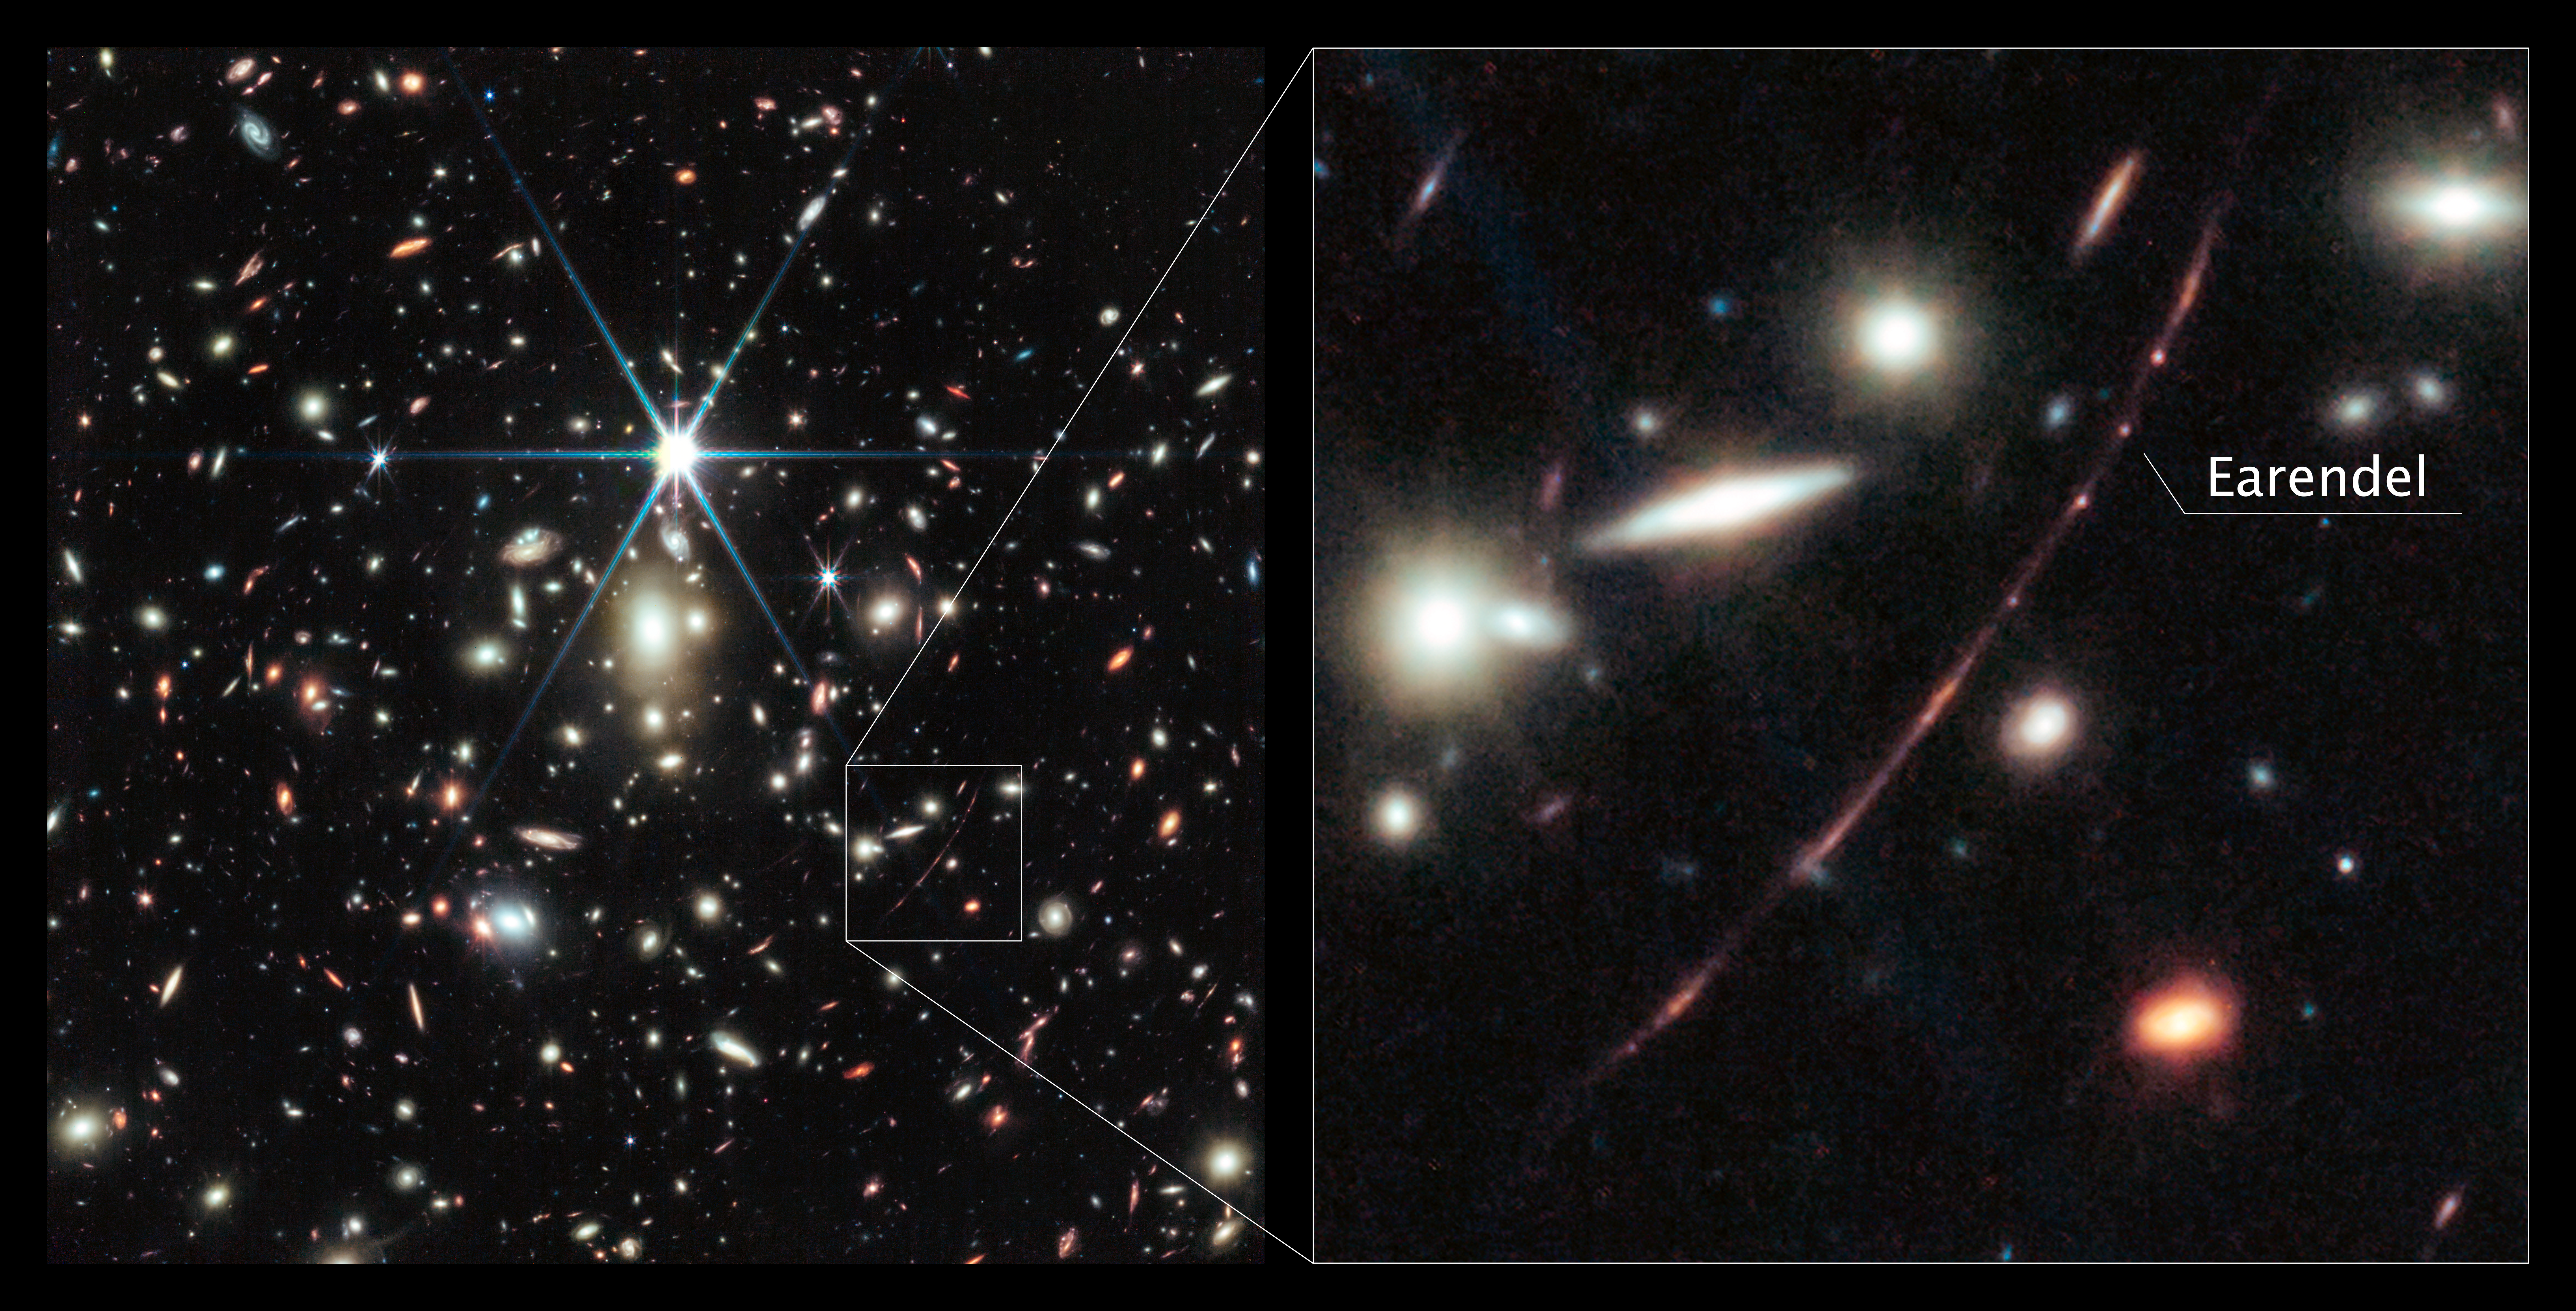

Earendel and the Sunrise Arc in the galaxy cluster WHL0137-08

This image from the NASA/ESA/CSA James Webb Space Telescope shows a massive galaxy cluster called WHL0137-08, and at the right, an inset of the most strongly magnified galaxy known in the Universe’s first billion years: the Sunrise Arc. Within that galaxy is the most distant star ever detected, first discovered by the NASA/ESA Hubble Space Telescope.

Webb’s NIRCam (Near-Infrared Camera) instrument reveals the star, nicknamed Earendel, to be a massive B-type star more than twice as hot as our Sun, and about a million times more luminous. Stars of this mass often have companions. Astronomers did not expect Webb to reveal any companions of Earendel since they would be so close together and indistinguishable on the sky. However, based solely on the colours of Earendel detected by Webb, astronomers think they see hints of a cooler companion star.

Webb’s NIRCam also shows other remarkable details in the Sunrise Arc. Features include both young star-forming regions and older established star clusters. On either side of the wrinkle of maximum magnification, which runs right through Earendel, these features are mirrored by the distortion of the gravitational lens. The region forming stars appears elongated, and is estimated to be less than 5 million years old. Smaller dots on either side of Earendel are two images of one older, more established star cluster, estimated to be 10 million years or older. Astronomers determined this star cluster is gravitationally bound and likely to persist until the present day. This shows us how the globular clusters in our own Milky Way might have looked when they formed 13 billion years ago.

Credit: NASA, ESA, CSA, D. Coe (AURA/STScI for ESA), Z. Levay